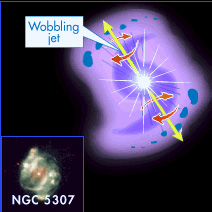

NGC 5307 illustration

NGC 5307 is a planetary nebula in the constellation Centaurus, about 8000 light years away. In the center of the nebula, which has a diameter of approximately 0.6 light years, a white dwarf is located which illuminates the gas from within.

The nebula itself has a spiral structure - as shown in the illustration - which may have been caused by the white star wobbling as it expelled jets of gas in different directions. NGC 5307 also shows a “point-symmetric” structure, what means that almost every blob has a counterpart on the opposite side of the central star.

Credit: NASA & ESA